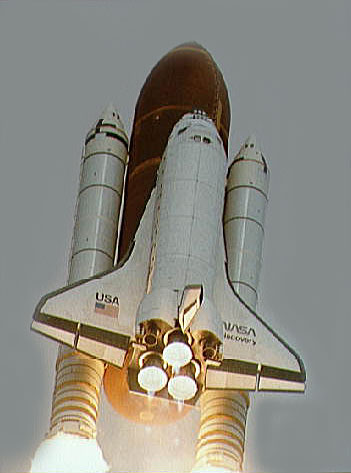

Launch of Space Shuttle for the deployment of the NASA/ESA Hubble Space Telescope

Launch of Space Shuttle for the deployment of the NASA/ESA Hubble Space Telescope

Credit: NASA & ESA